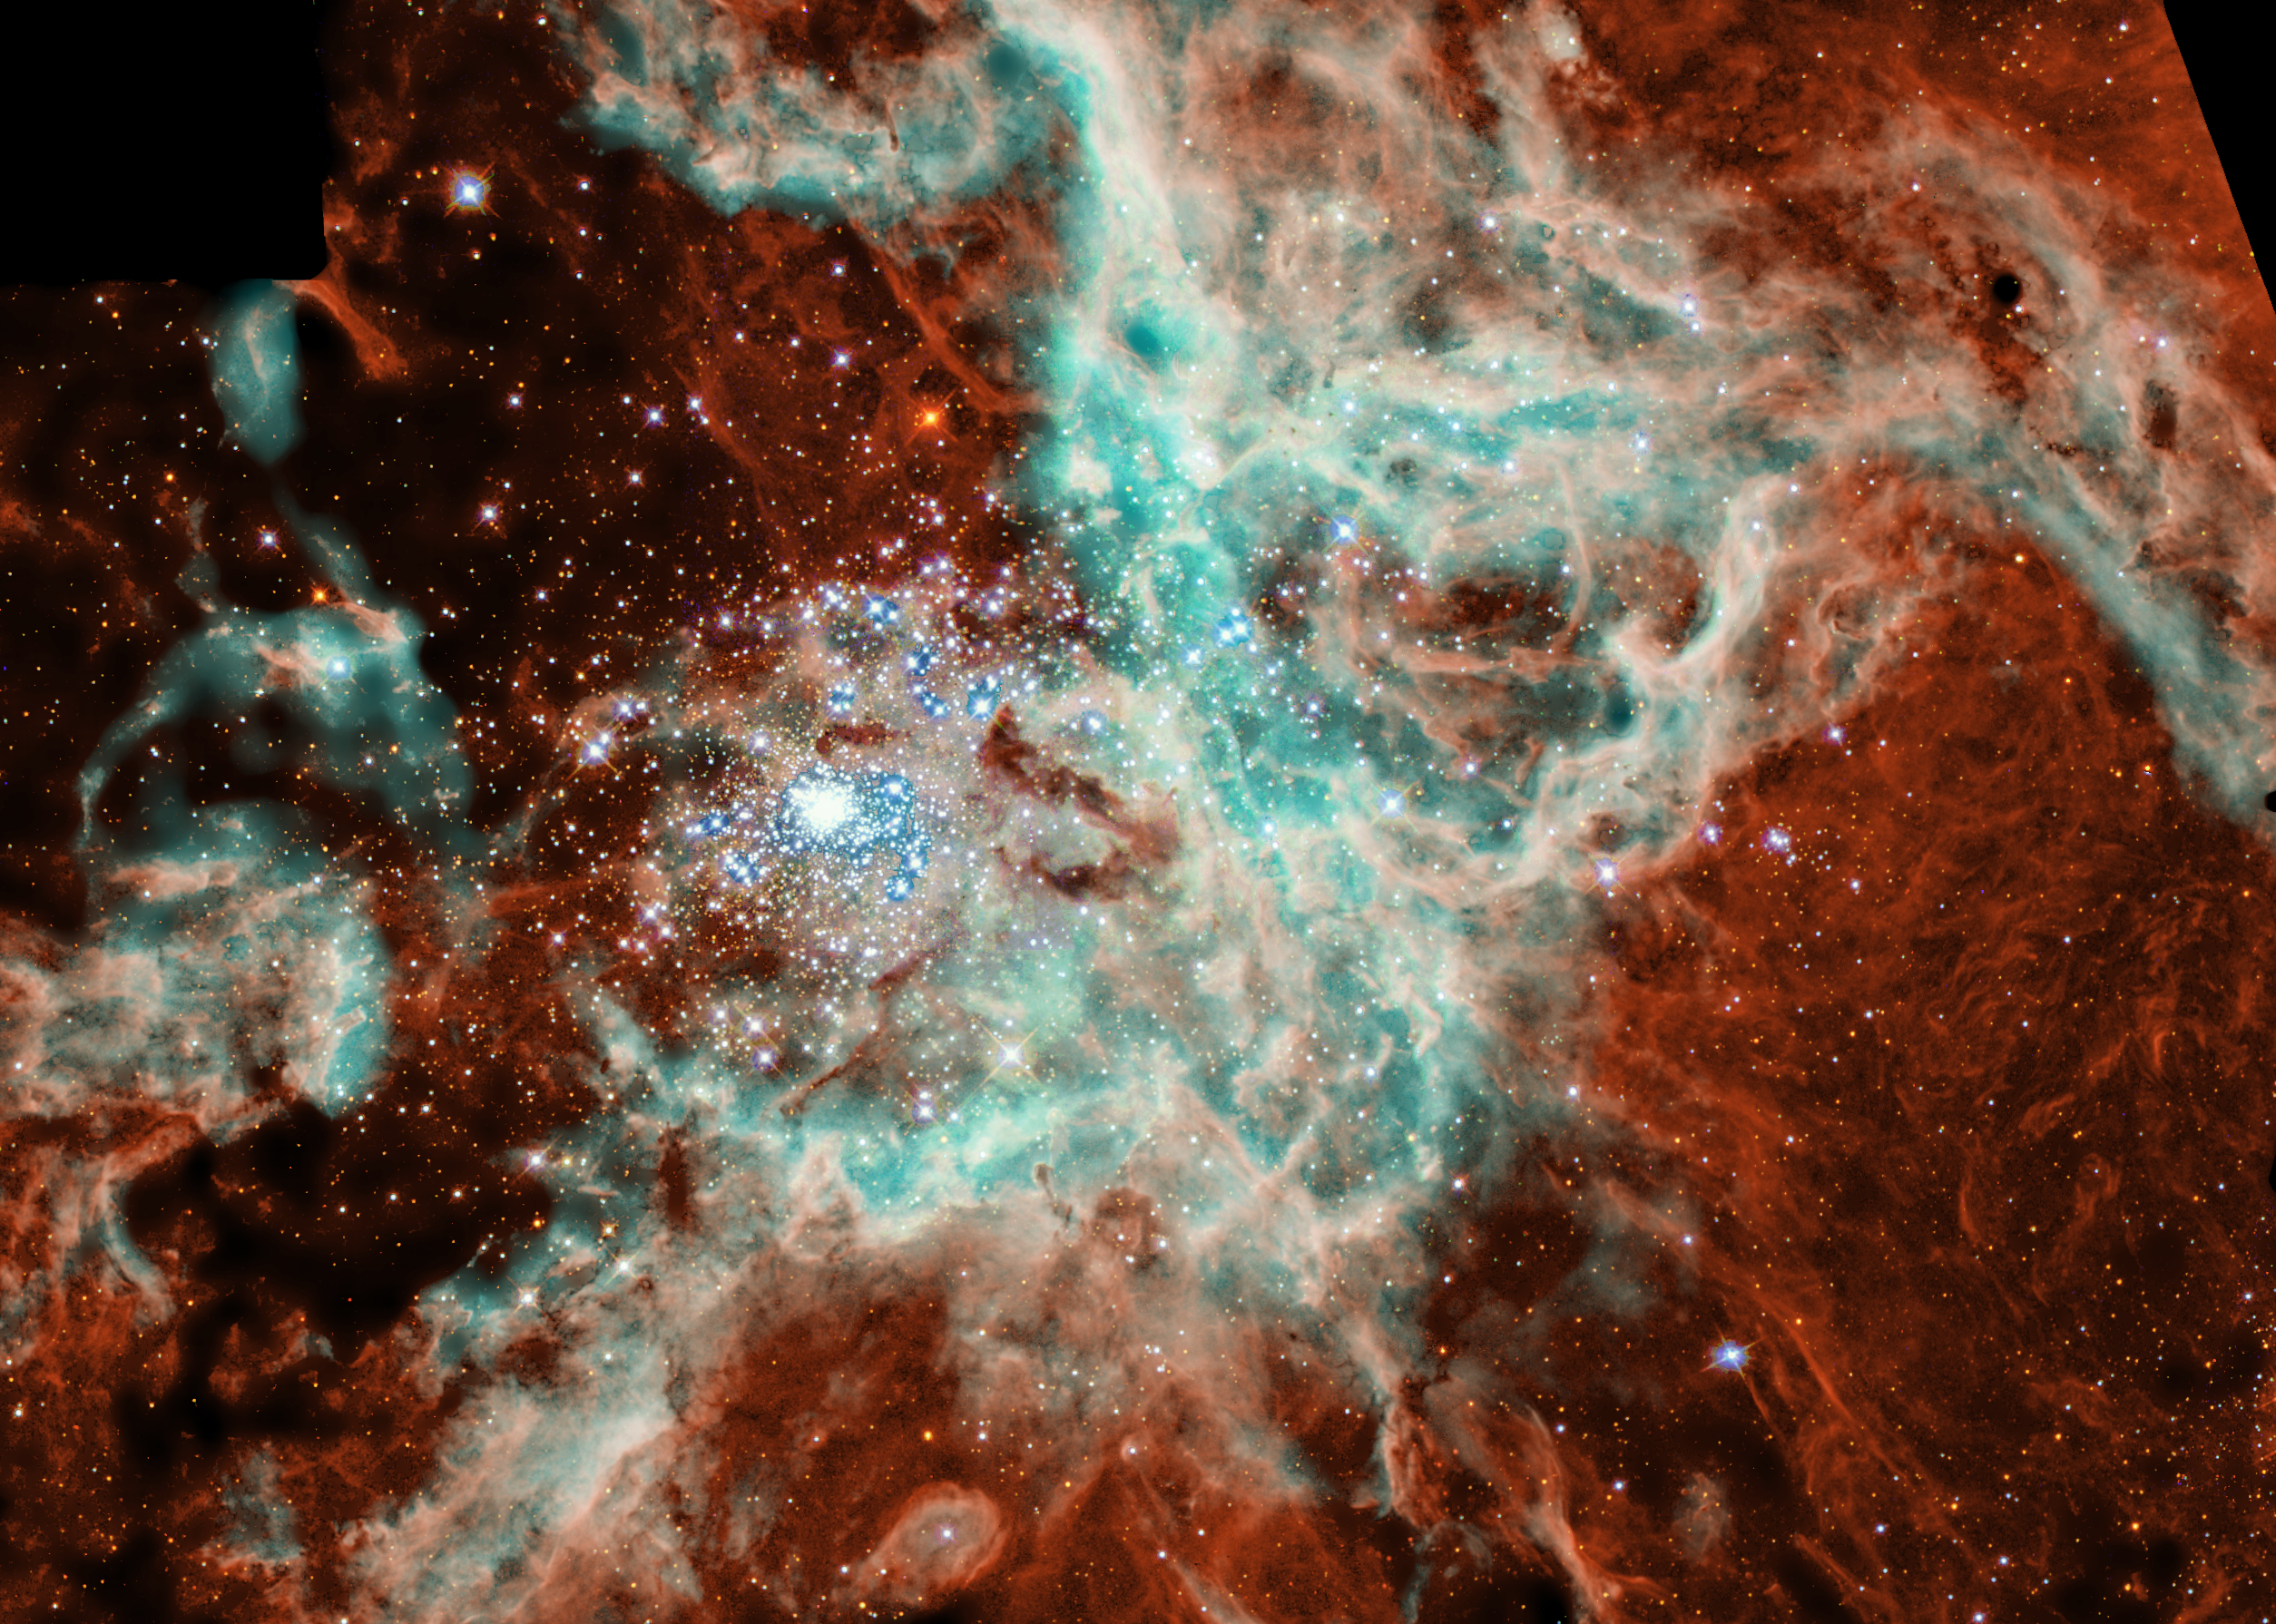

A Portrait of R136

The NASA/ESA Hubble Space Telescope has snapped a panoramic portrait of a vast, sculpted landscape of gas and dust where thousands of stars are being born. This fertile star-forming region, called the 30 Doradus Nebula, has a sparkling stellar centerpiece: the most spectacular cluster of massive stars in our cosmic neighborhood of about 25 galaxies. The mosaic picture shows that ultraviolet radiation and high-speed material unleashed by the stars in the cluster, called R136 [the large blue blob left of center], are weaving a tapestry of creation and destruction, triggering the collapse of looming gas and dust clouds and forming pillar-like structures that are incubators for nascent stars.

Credit: NASA/ESA, N. Walborn and J. Mamz-Apellaniz ( Space Telescope Science Institute, Baltimore, MD), R. Barba (La Plata Observatory, La Plata, Argentina)